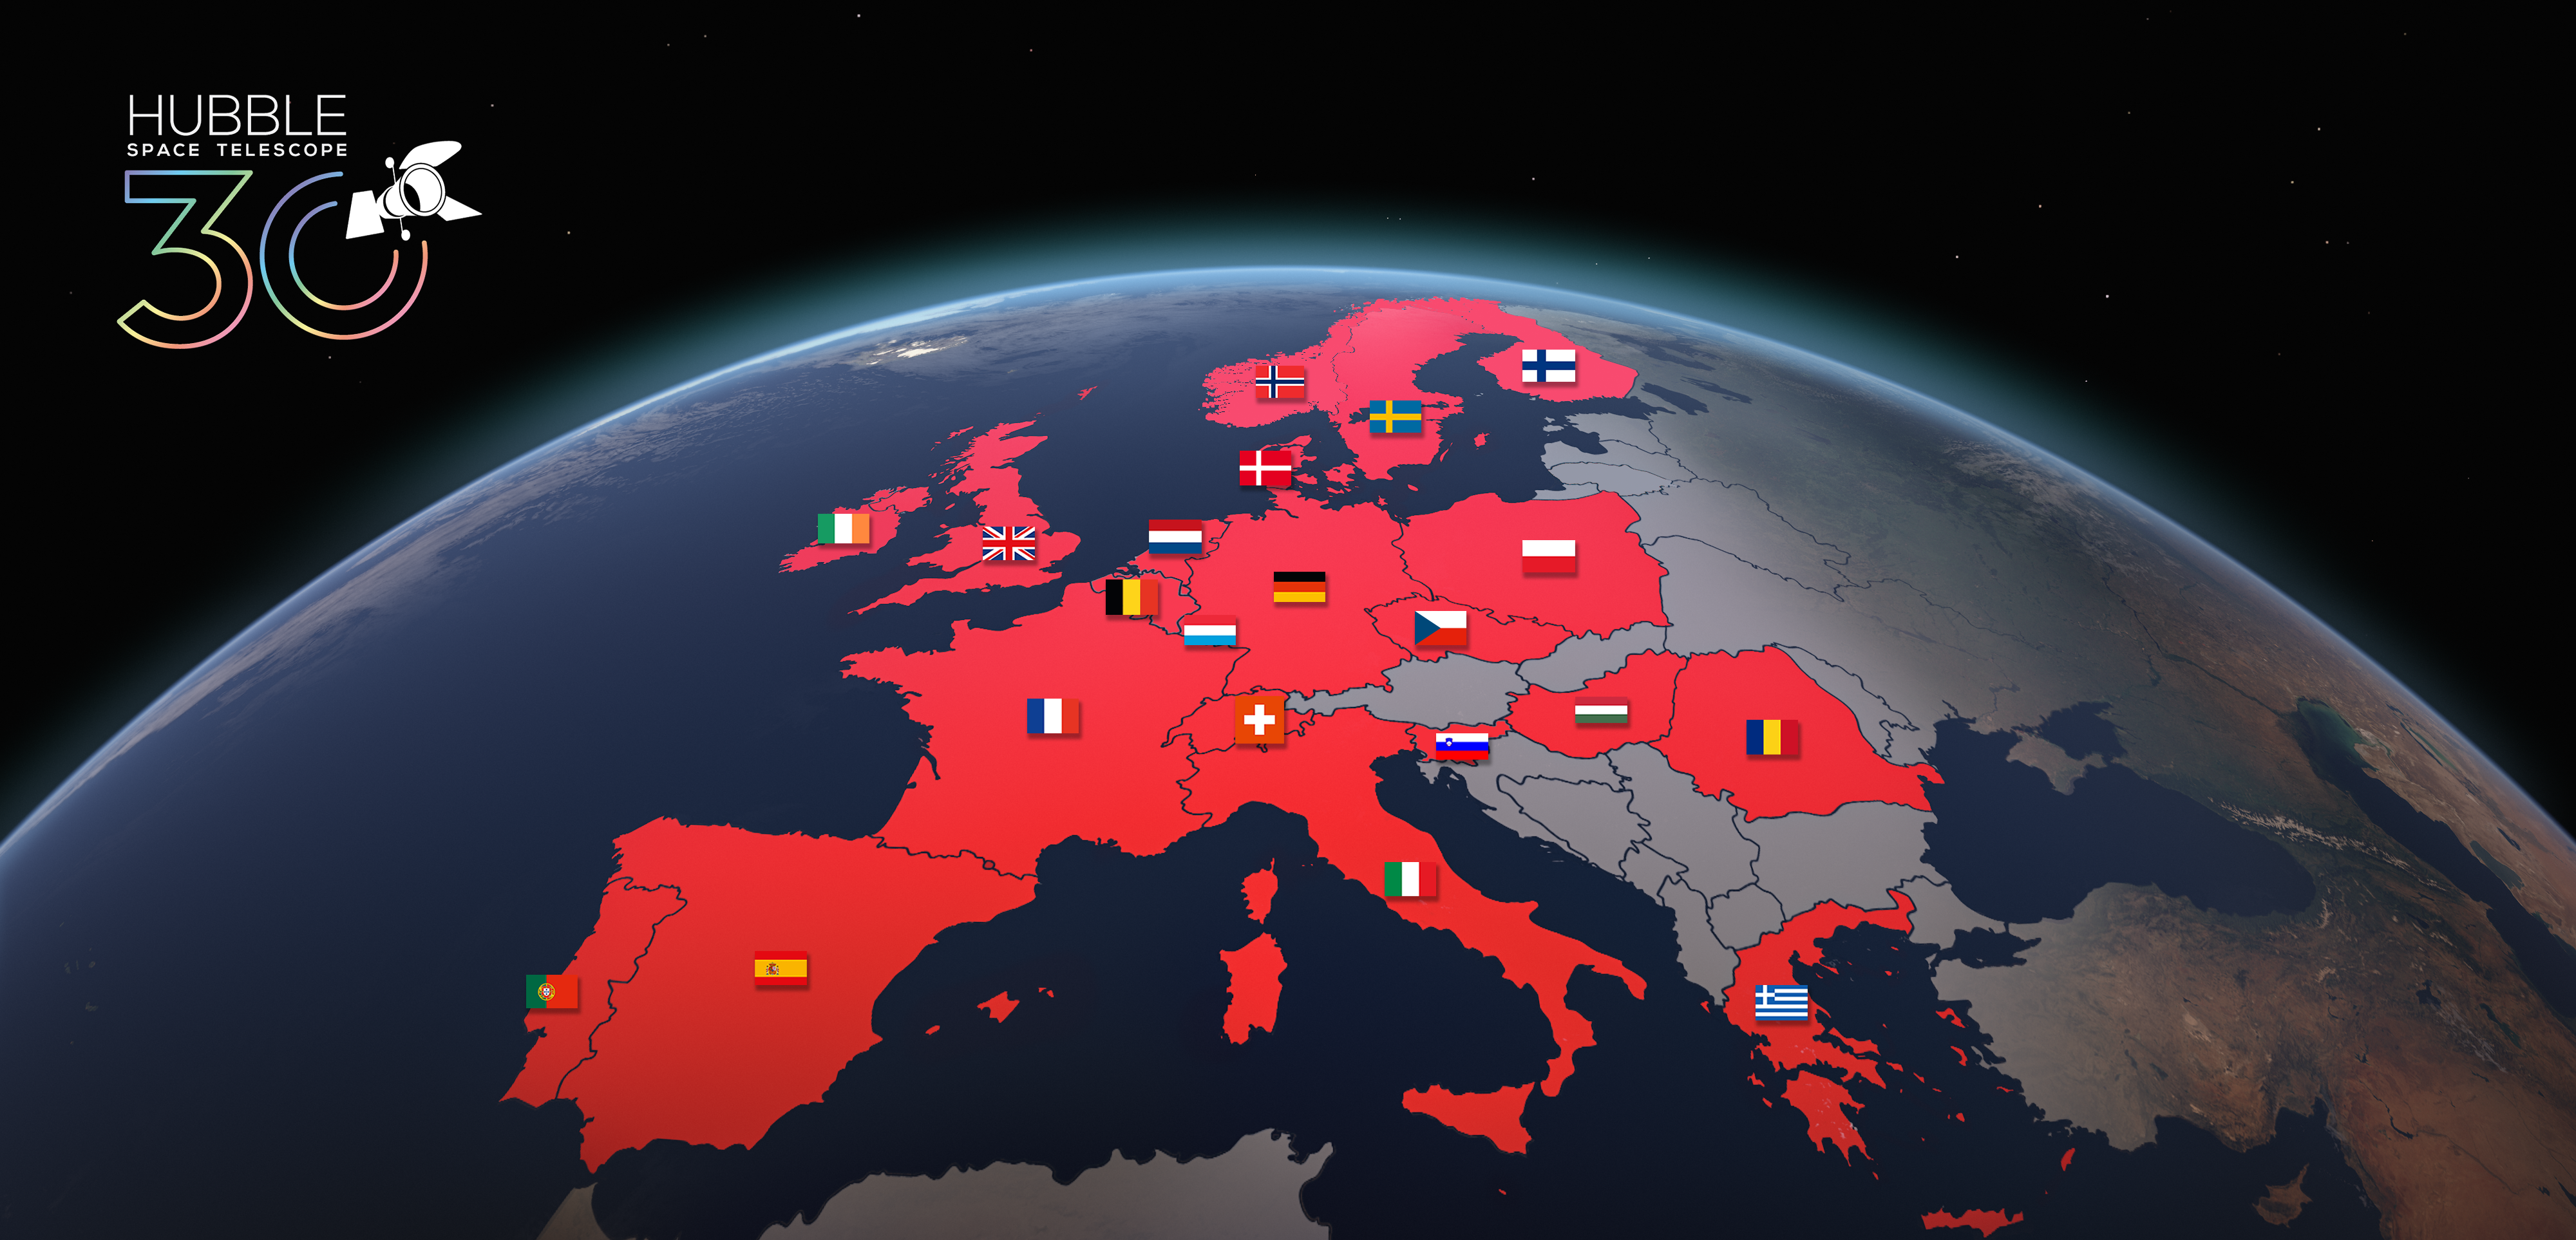

Host Locations for Hubble’s 30th Anniversary Image Unveiling

The countries with various education venues that will host events in celebration of Hubble’s 30th year in orbit, including the unveiling of a large and high-quality print of the 30th anniversary image provided by ESA/Hubble, are shown on this map.

These countries are: Belgium, Czech Republic, Denmark, Finland, France, Germany, Greece, Hungary, Ireland, Italy, Luxembourg, the Netherlands, Norway, Poland, Portugal, Romania, Slovenia, Spain, Sweden, Switzerland, and the United Kingdom.

Credit: ESA/Hubble